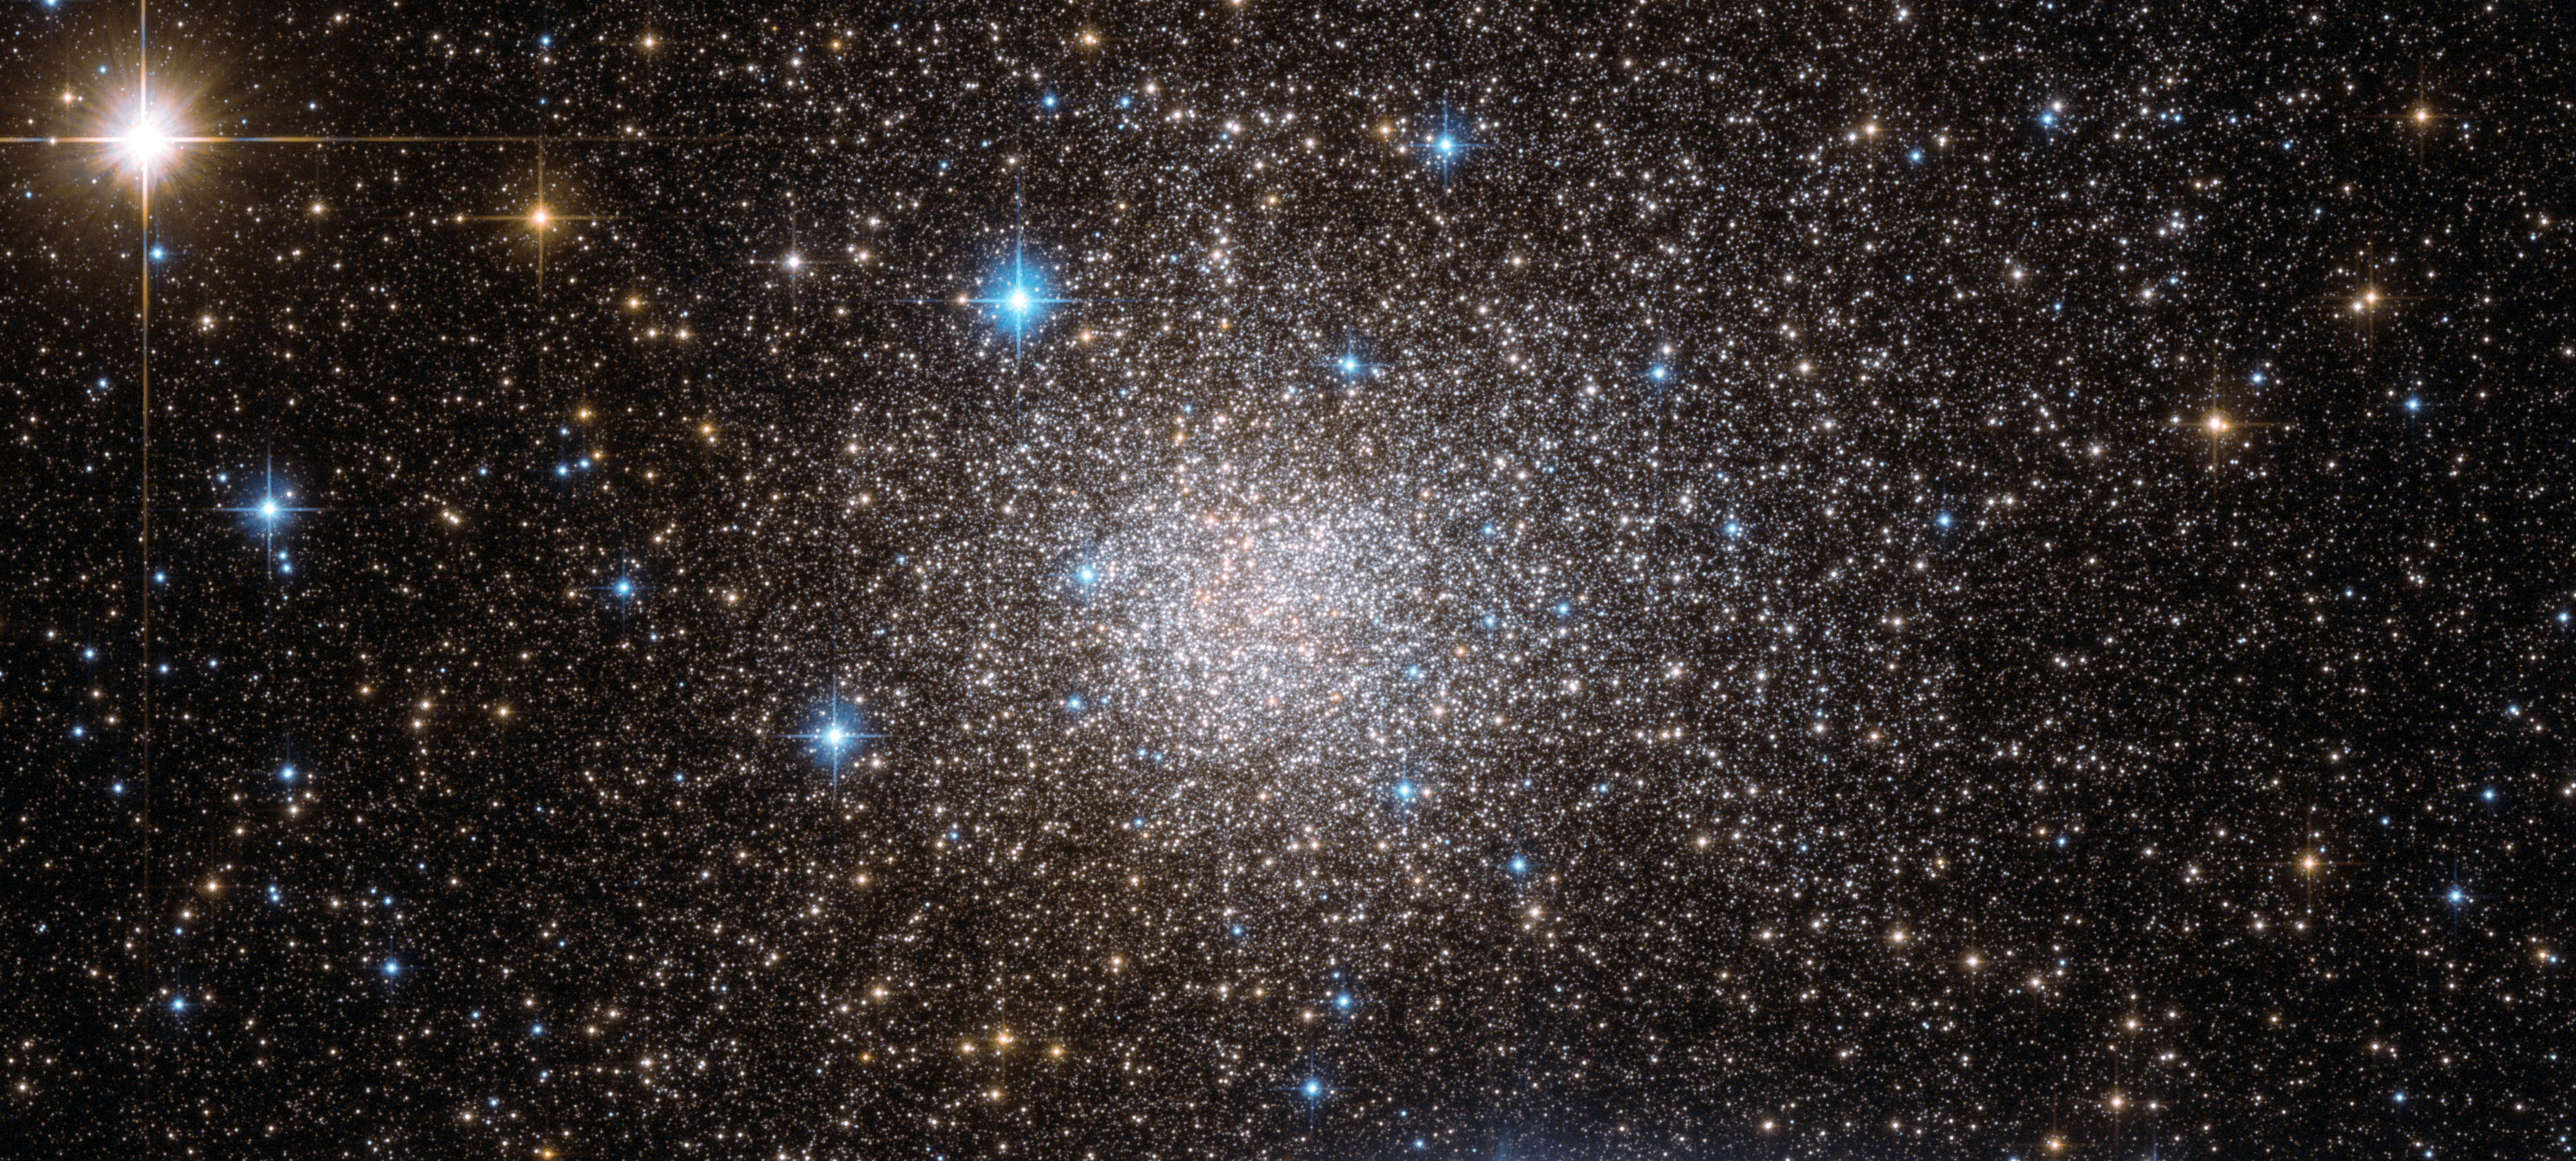

Commotion in a crowded cluster

Deep within the Milky Way lies the ancient globular cluster Terzan 5. This NASA/ESA Hubble Space Telescope image shows the cluster in wonderful detail, but it is the chaotic motions of its stars that make it particularly interesting to astronomers.

Terzan 5 has an exceptionally dense core. As a result, it is thought to have one of the highest stellar collision rates for a globular cluster. And packed in at such close quarters, many stars are pushed so close together that they form tight binary systems.

Interestingly, studies of individual stars within the cluster reveal that they can be split into two age groups: 6 and 12 billion years old. Some astronomers have hypothesised that the younger crowd may have been stripped away from a dwarf galaxy.

This picture was created from images taken with the Wide Field Channel of Hubble’s Advanced Camera for Surveys. Images through a yellow/red filter (F606W, coloured blue) have been combined with those through a near-infrared filter (F814W, coloured red) to create this composite picture. The total exposure times per filter were 340 s and 360 s, respectively and the field of view is 3.1 x 1.4 arcminutes.

Credit: ESA/Hubble & NASA